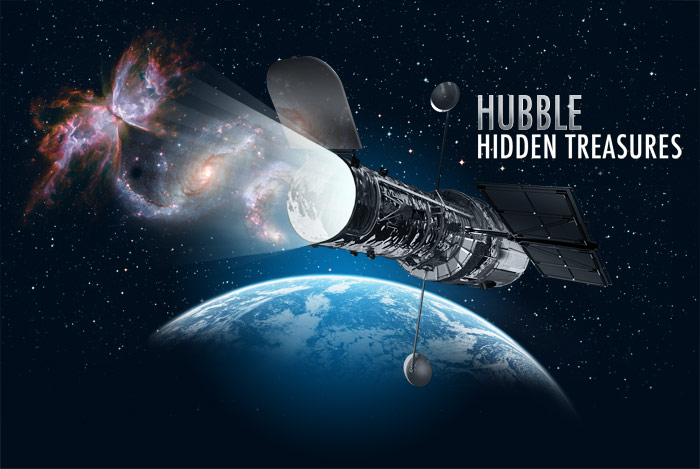

Flickr image for Hubble's Hidden Treasures

This illustration was used on Flickr for the Hubble's Hidden Treasures image processing competition.

Credit: NASA & ESA